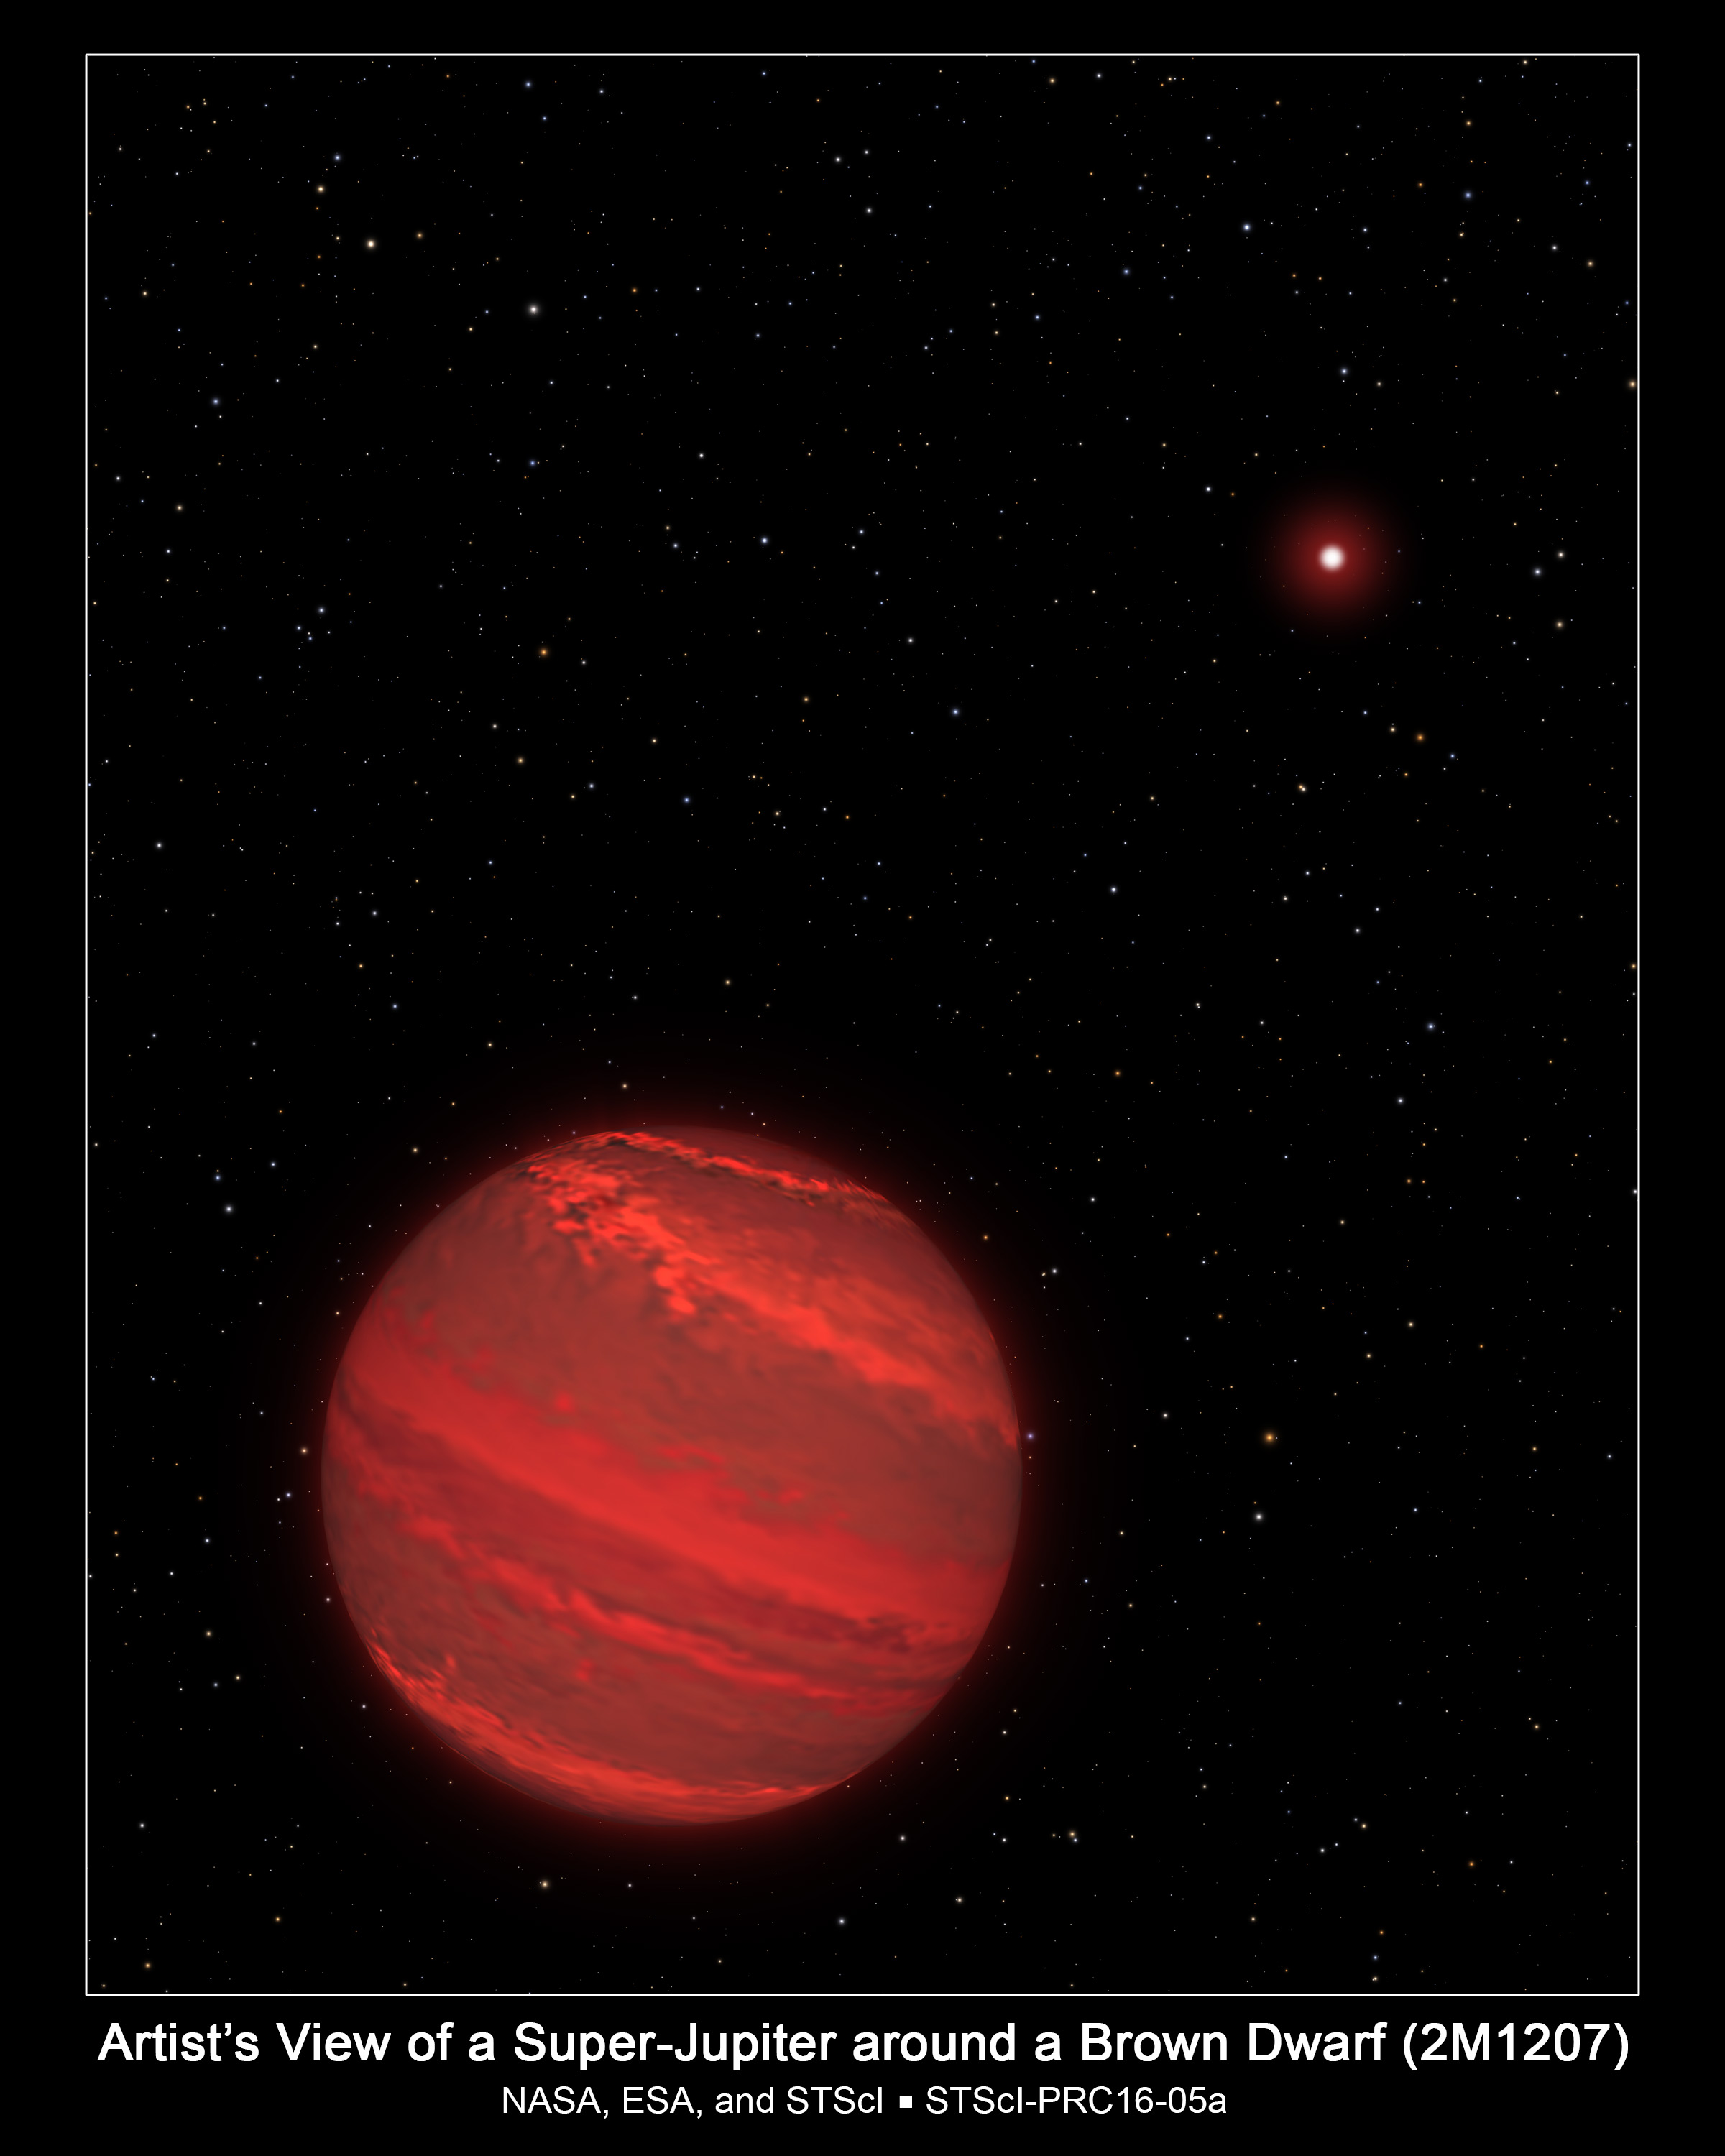

Artist's View of a Super-Jupiter around a Brown Dwarf (2M1207)

This is an artist impression of a planet that is four times the mass of Jupiter and orbits 8 billion kilometres from a brown-dwarf companion (the bright red object seen in the background). The rotation rate of this super-Jupiter has been measured by studying subtle variations in the infrared light the hot planet radiates through a variegated, cloudy atmosphere. The planet completes one rotation every 10 hours — about the same rate as Jupiter. Because the planet is young, it is still contracting under gravity and radiating heat. The atmosphere is so hot that it rains molten glass and, at lower altitudes, molten iron.

Because the planet is only 170 light-years away, many of the bright background stars that can be seen from Earth can be seen from the planet's location in our galaxy, including Sirius, Fomalhaut, and Alpha Centauri. Our sun is a faint star in the background, located midway between Procyon and Altair.

Credit: NASA, ESA, and G. Bacon (STScI)